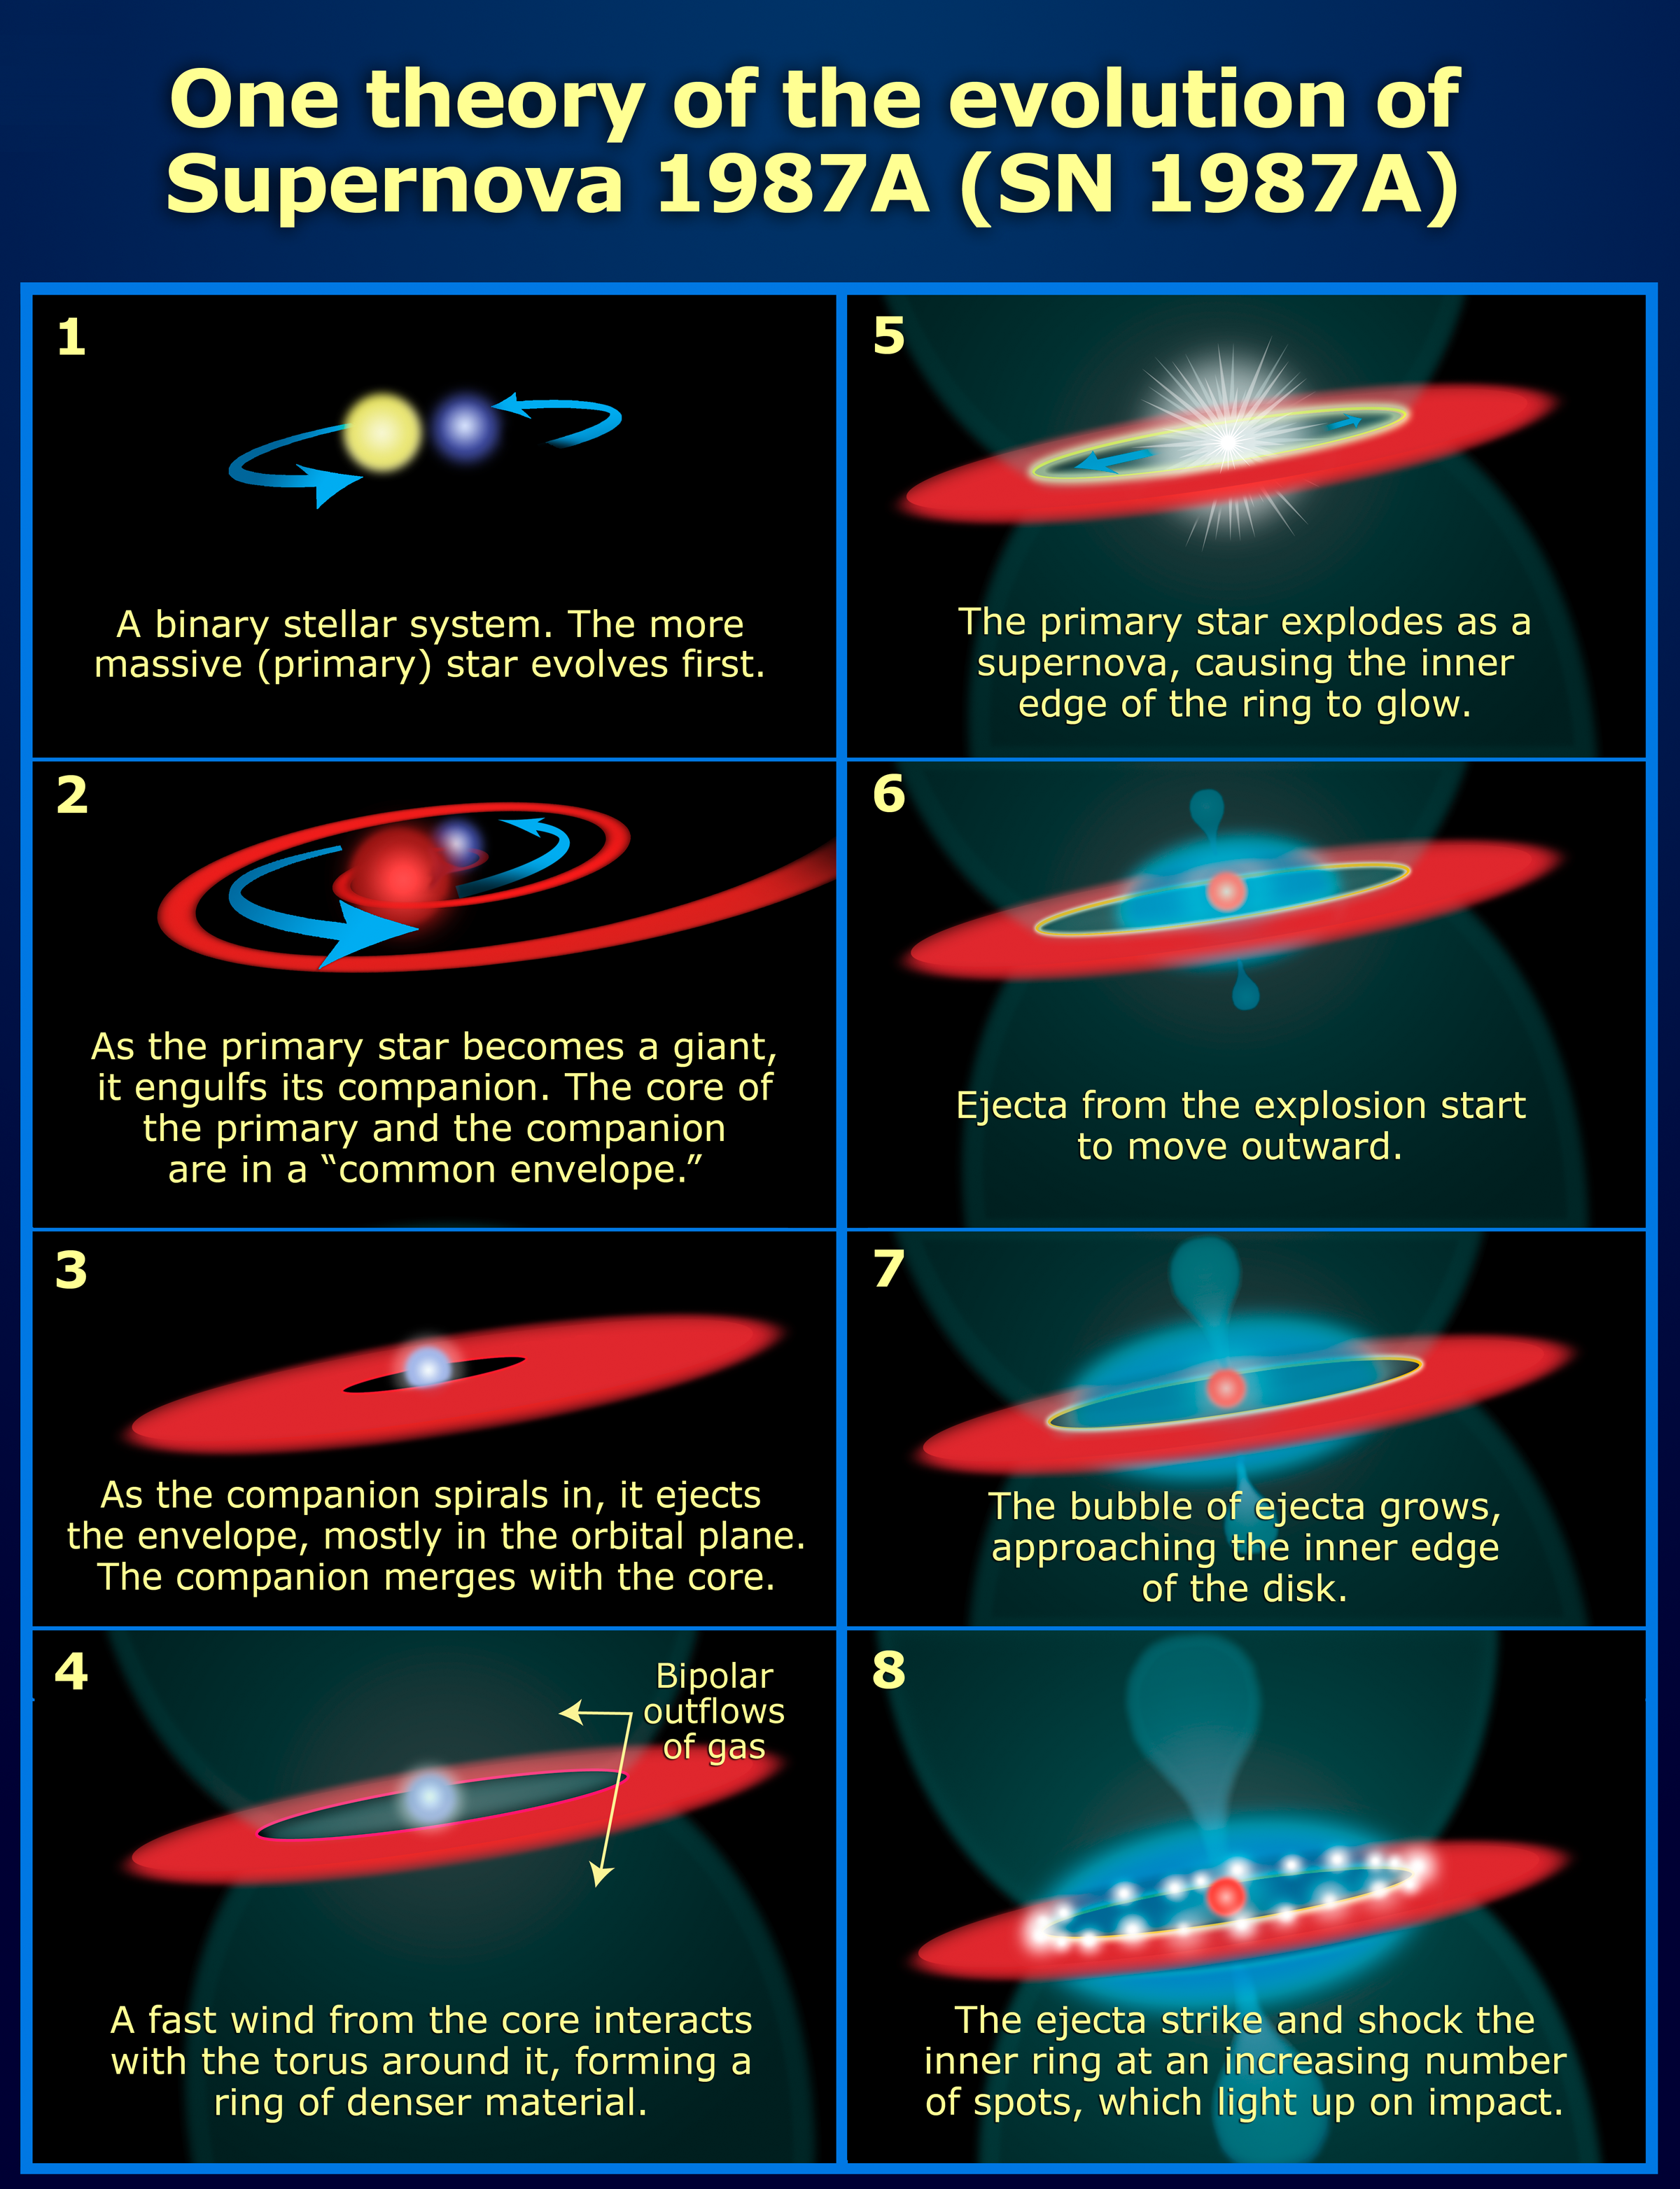

Evolution of Supernova 1987A

This diagram shows one of the theories for the evolution of Supernova 1987A.

Credit: NASA, ESA, and A, Feild (STScI)